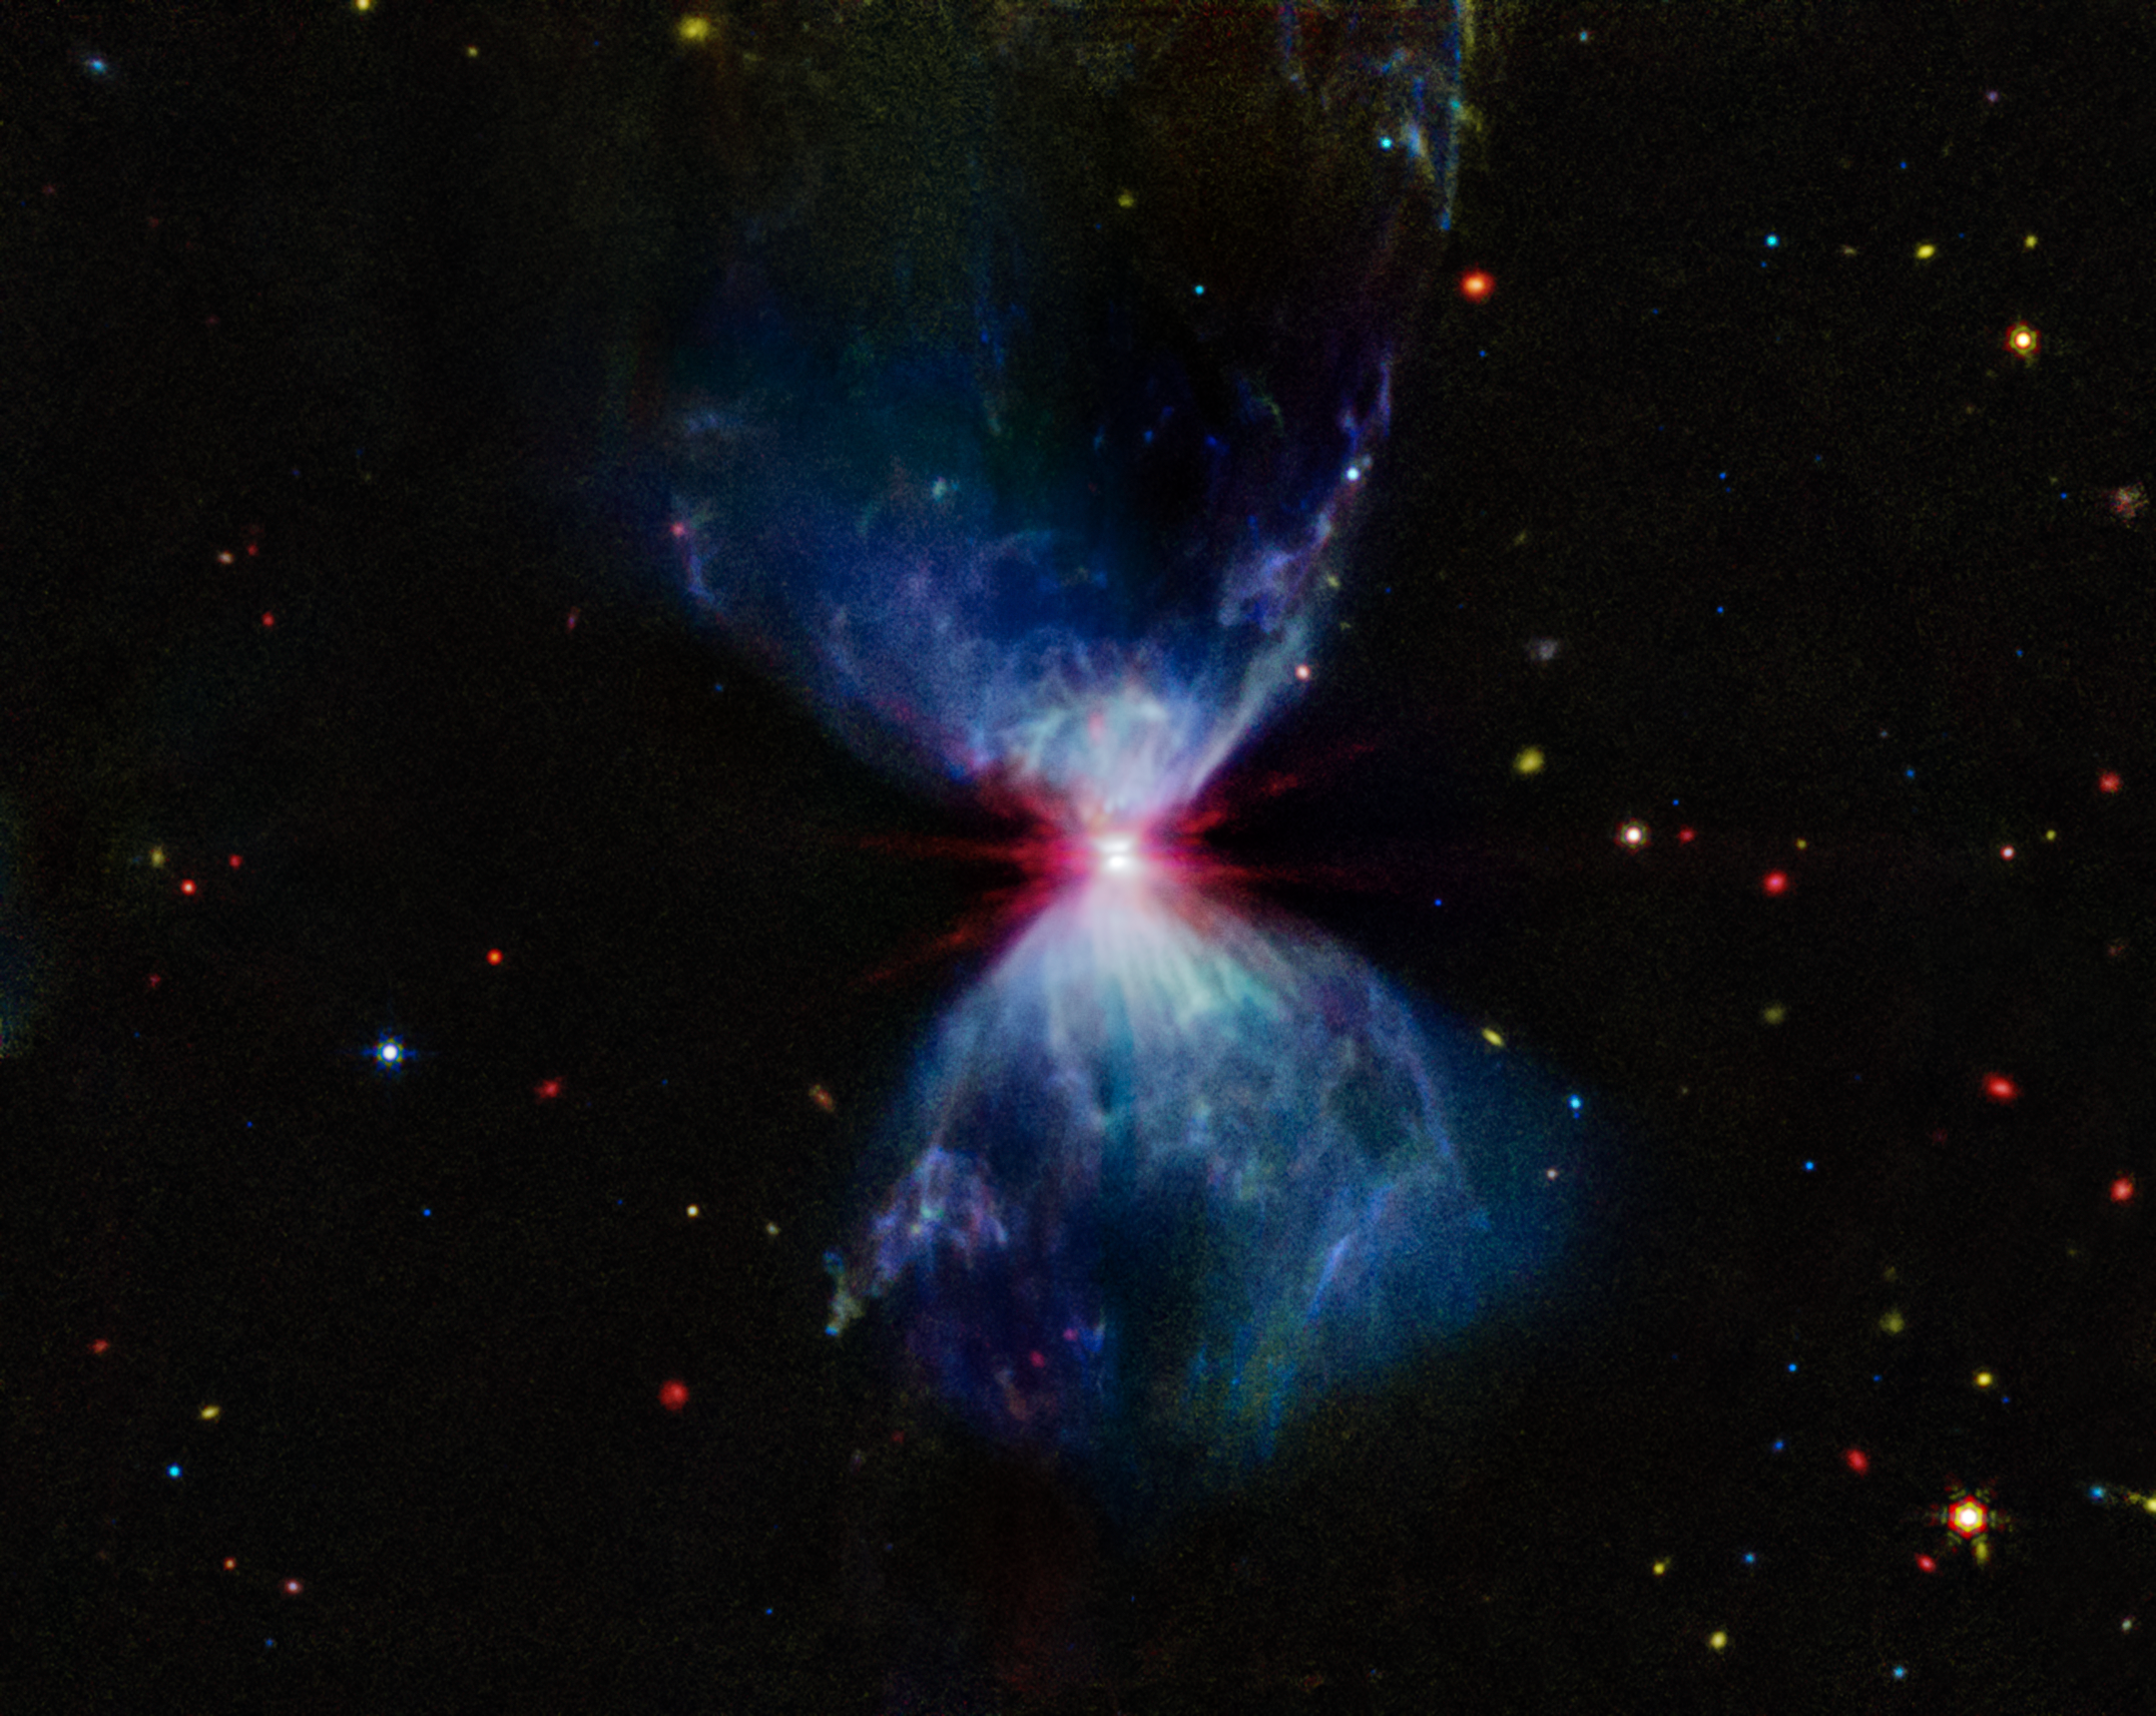

L1527 (MIRI image)

L1527, shown in this image from the NASA/ESA/CSA James Webb Space Telescope’s MIRI (Mid-Infrared Instrument), is a molecular cloud that harbors a protostar. It resides in the constellation Taurus, about 460 light-years from Earth. The more diffuse blue light and the filamentary structures in the image come from organic compounds known as polycyclic aromatic hydrocarbons (PAHs), while the red at the center of this image is an energized, thick layer of gases and dust that surrounds the protostar. The region in between, which shows up in white, is a mixture of PAHs, ionized gas, and other molecules.

As the protostar continues to age and release energetic jets, it’ll consume, destroy, and push away much of this molecular cloud, and many of the structures we see here will begin to fade. Eventually, once it finishes gathering mass, this impressive display will end, and the star itself will become more apparent, even to our visible-light telescopes.

This image includes filters representing 7.7 microns light as blue, 12.8 microns light as green, and 18 microns light as red.

Credit: NASA, ESA, CSA, STScI